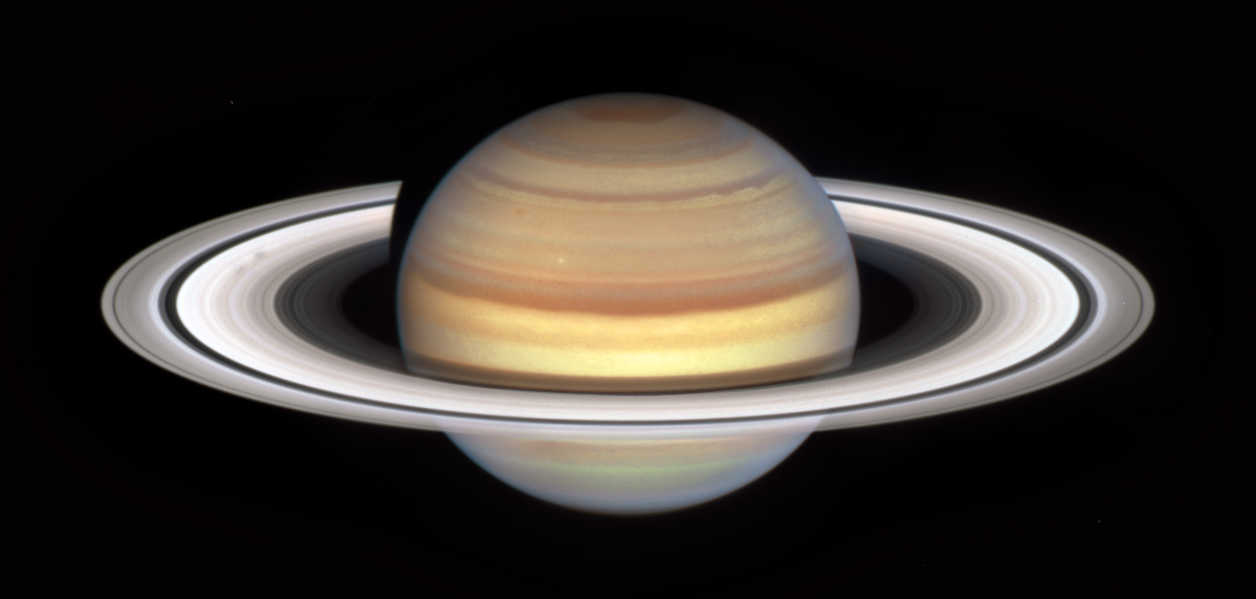

Spokes Spotted In Saturn's Rings

The NASA/ESA Hubble Space Telescope has observation time devoted to Saturn each year, thanks to the Outer Planet Atmospheres Legacy (OPAL) program, and the dynamic gas giant planet always shows us something new. This latest image heralds the start of Saturn's "spoke season" with the appearance of two smudgy spokes in the B ring, on the left in the image.

The spokes are enigmatic features which appear across Saturn’s rings. Their presence and appearance varies with the seasons — like Earth, Saturn is tilted on its axis and therefore has four seasons. With Saturn's much larger orbit, each season lasts approximately seven Earth years. Equinox occurs when the rings are tilted edge-on to the Sun and marks the height of spokes’ visibility, while during a solstice when the Sun is at its highest or lowest latitude, the spokes disappear.

The shape and shading of spokes varies — they can appear light or dark, depending on the viewing angle, and sometimes appear more like blobs than classic radial spoke shapes, as seen here. The ephemeral features don't last long, but as the planet's autumnal equinox approaches on 6 May 2025, more will appear.

Scientists will be looking for clues to explain the cause and nature of the spokes. It's suspected they are caused by interaction between Saturn's magnetic field and the solar wind, which also causes aurorae to appear on the planet. The hypothesis is that spokes are the smallest, dust-sized, icy ring particles being temporarily electrically charged and levitated, but this has not been confirmed.

Saturn's last equinox occurred in 2009, while the NASA/ESA/ASI Cassini spacecraft was orbiting the gas giant planet for close-up reconnaissance. With Cassini's mission completed in 2017, Hubble is continuing the work of long-term monitoring of changes on Saturn and the other outer planets.

Credit: ESA/Hubble, NASA & A. Simon, A. Pagan (STScI)